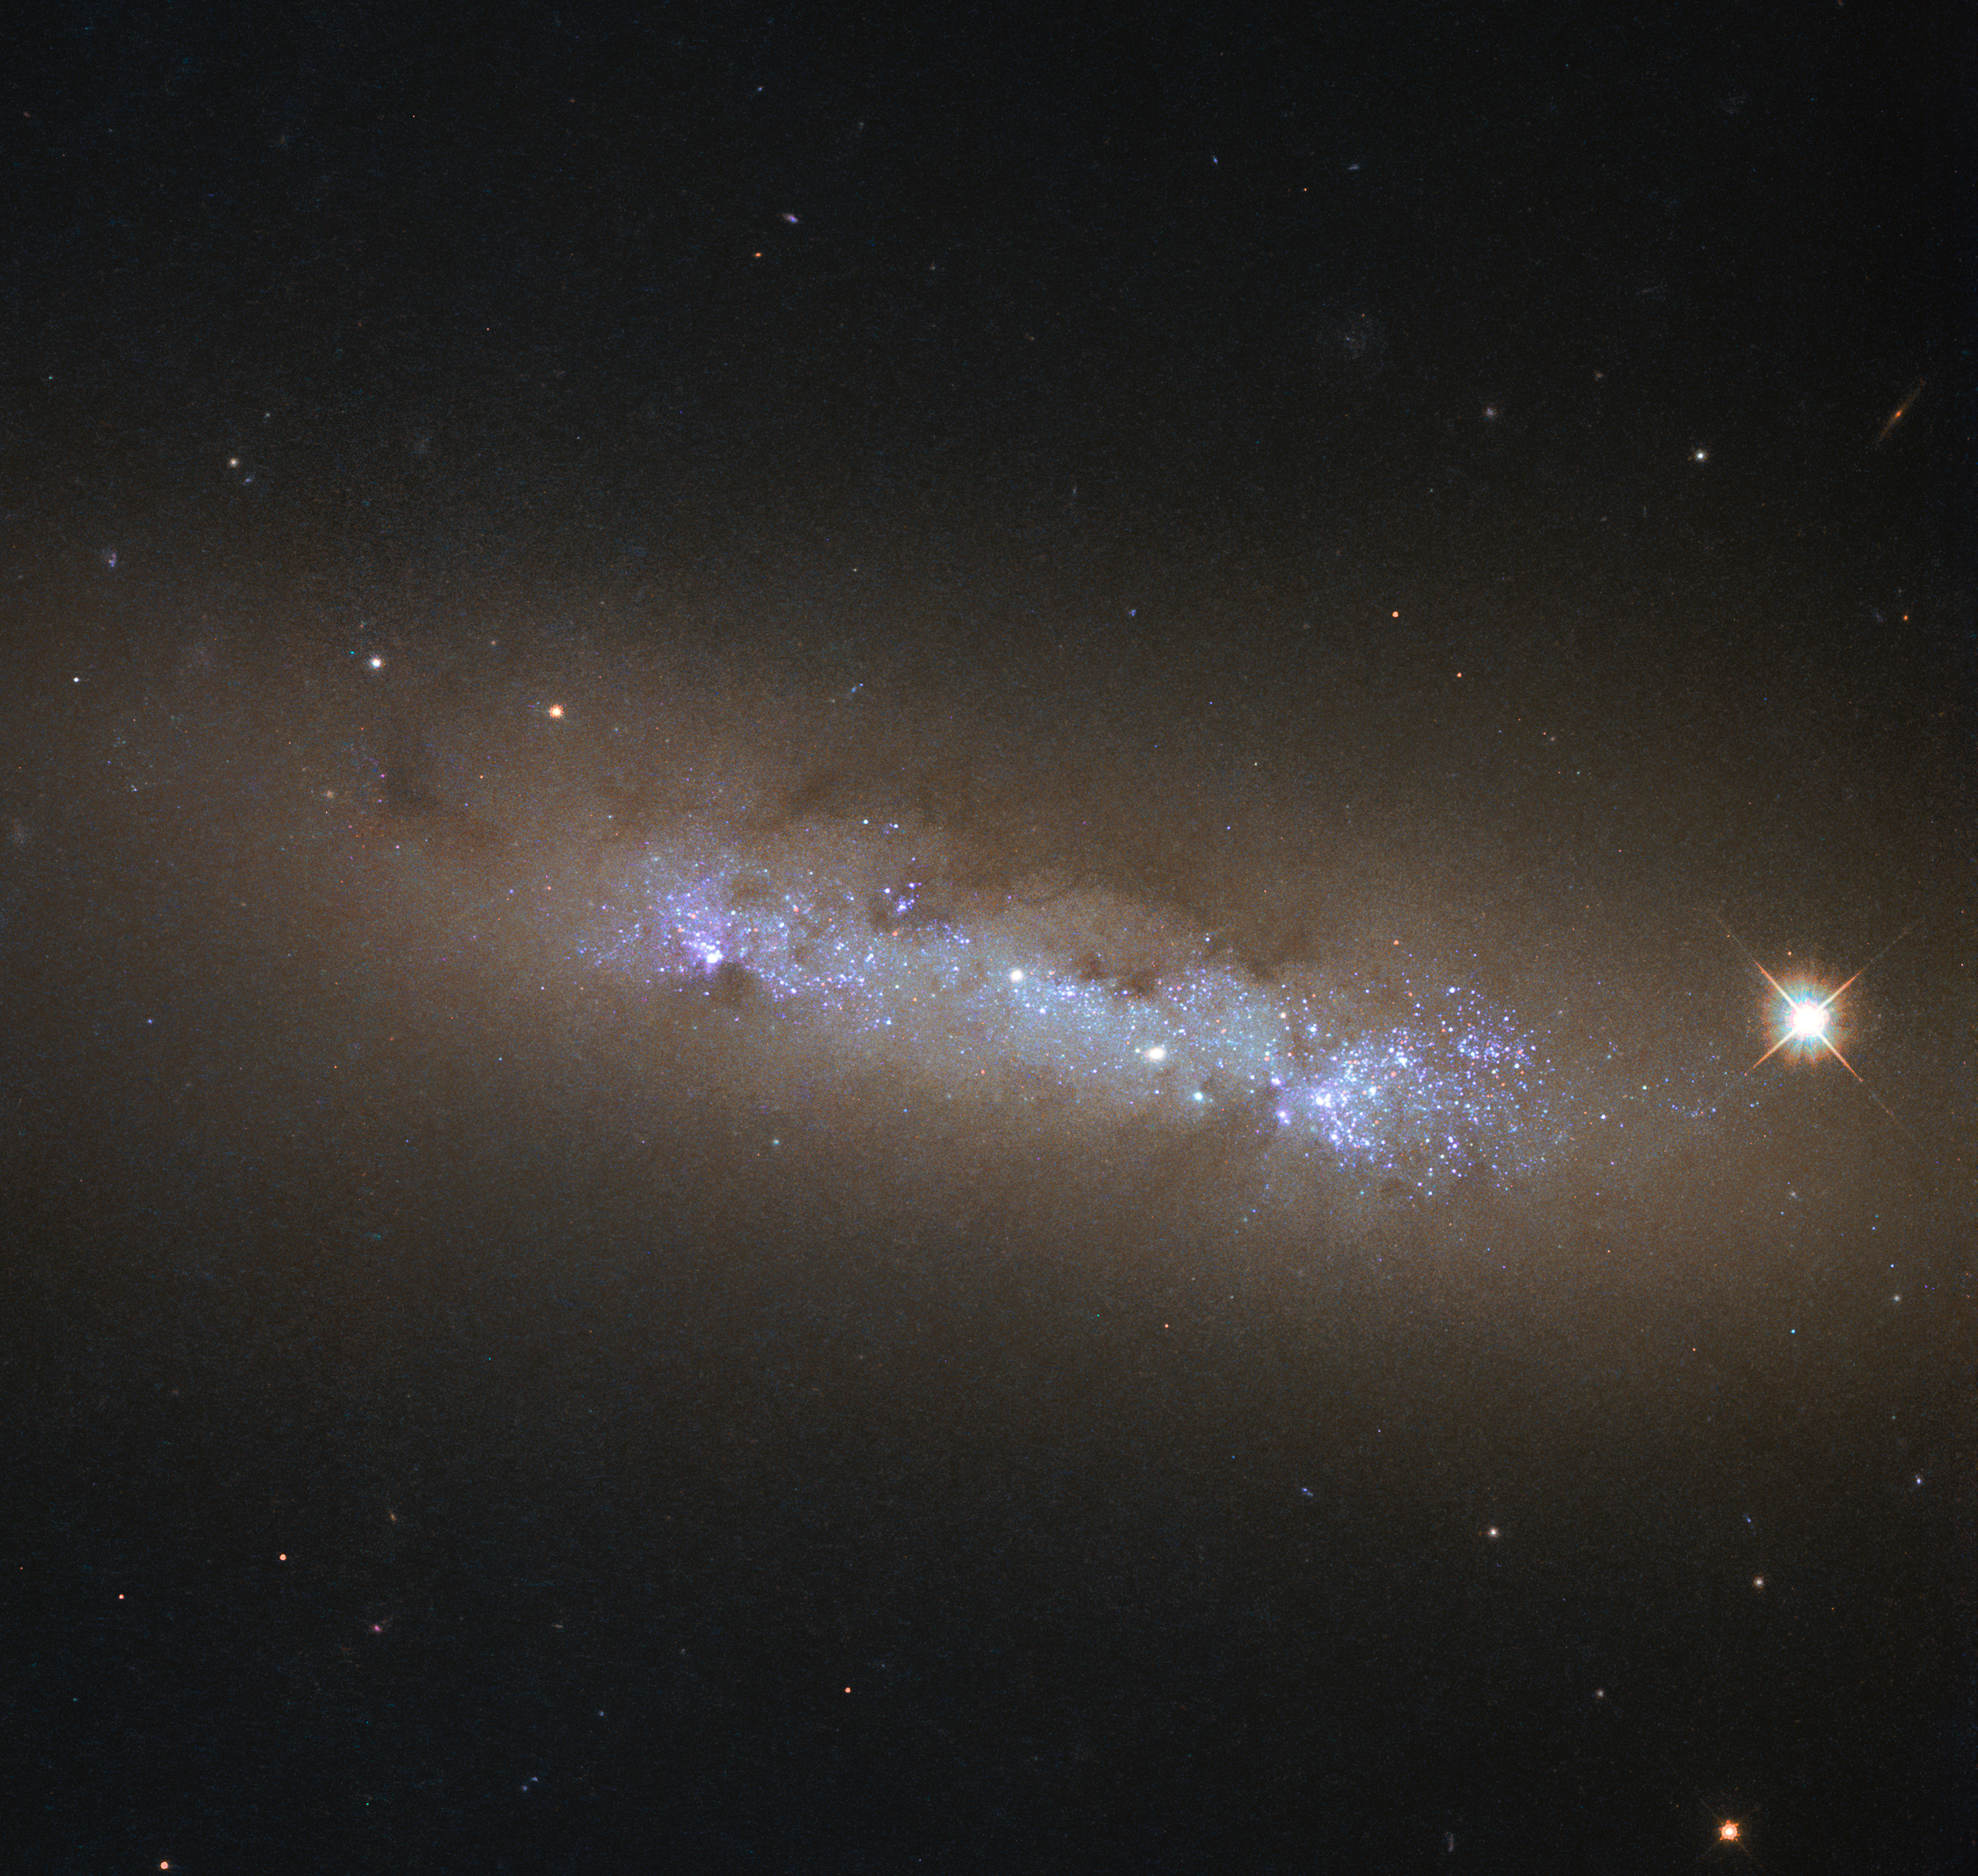

A cosmic atlas

This beautiful clump of glowing gas, dark dust, and glittering stars is the spiral galaxy NGC 4248, located about 24 million light-years away in the constellation of Canes Venatici (The Hunting Dogs).

This image was produced by the NASA/ESA Hubble Space Telescope as it embarked upon compiling the first Hubble ultraviolet “atlas”, for which the telescope targeted 50 nearby star-forming galaxies. A sample spanning all kinds of different morphologies, masses, and structures. Studying this sample can help us to piece together the star-formation history of the Universe.

By exploring how massive stars form and evolve within such galaxies, astronomers can learn more about how, when, and where star formation occurs, how star clusters change over time, and how the process of forming new stars is related to the properties of both the host galaxy and the surrounding interstellar medium (the “stuff” that fills the space between individual stars).

This image is formed of observations from Hubble’s Wide Field Camera 3.

Credit: ESA/Hubble & NASA